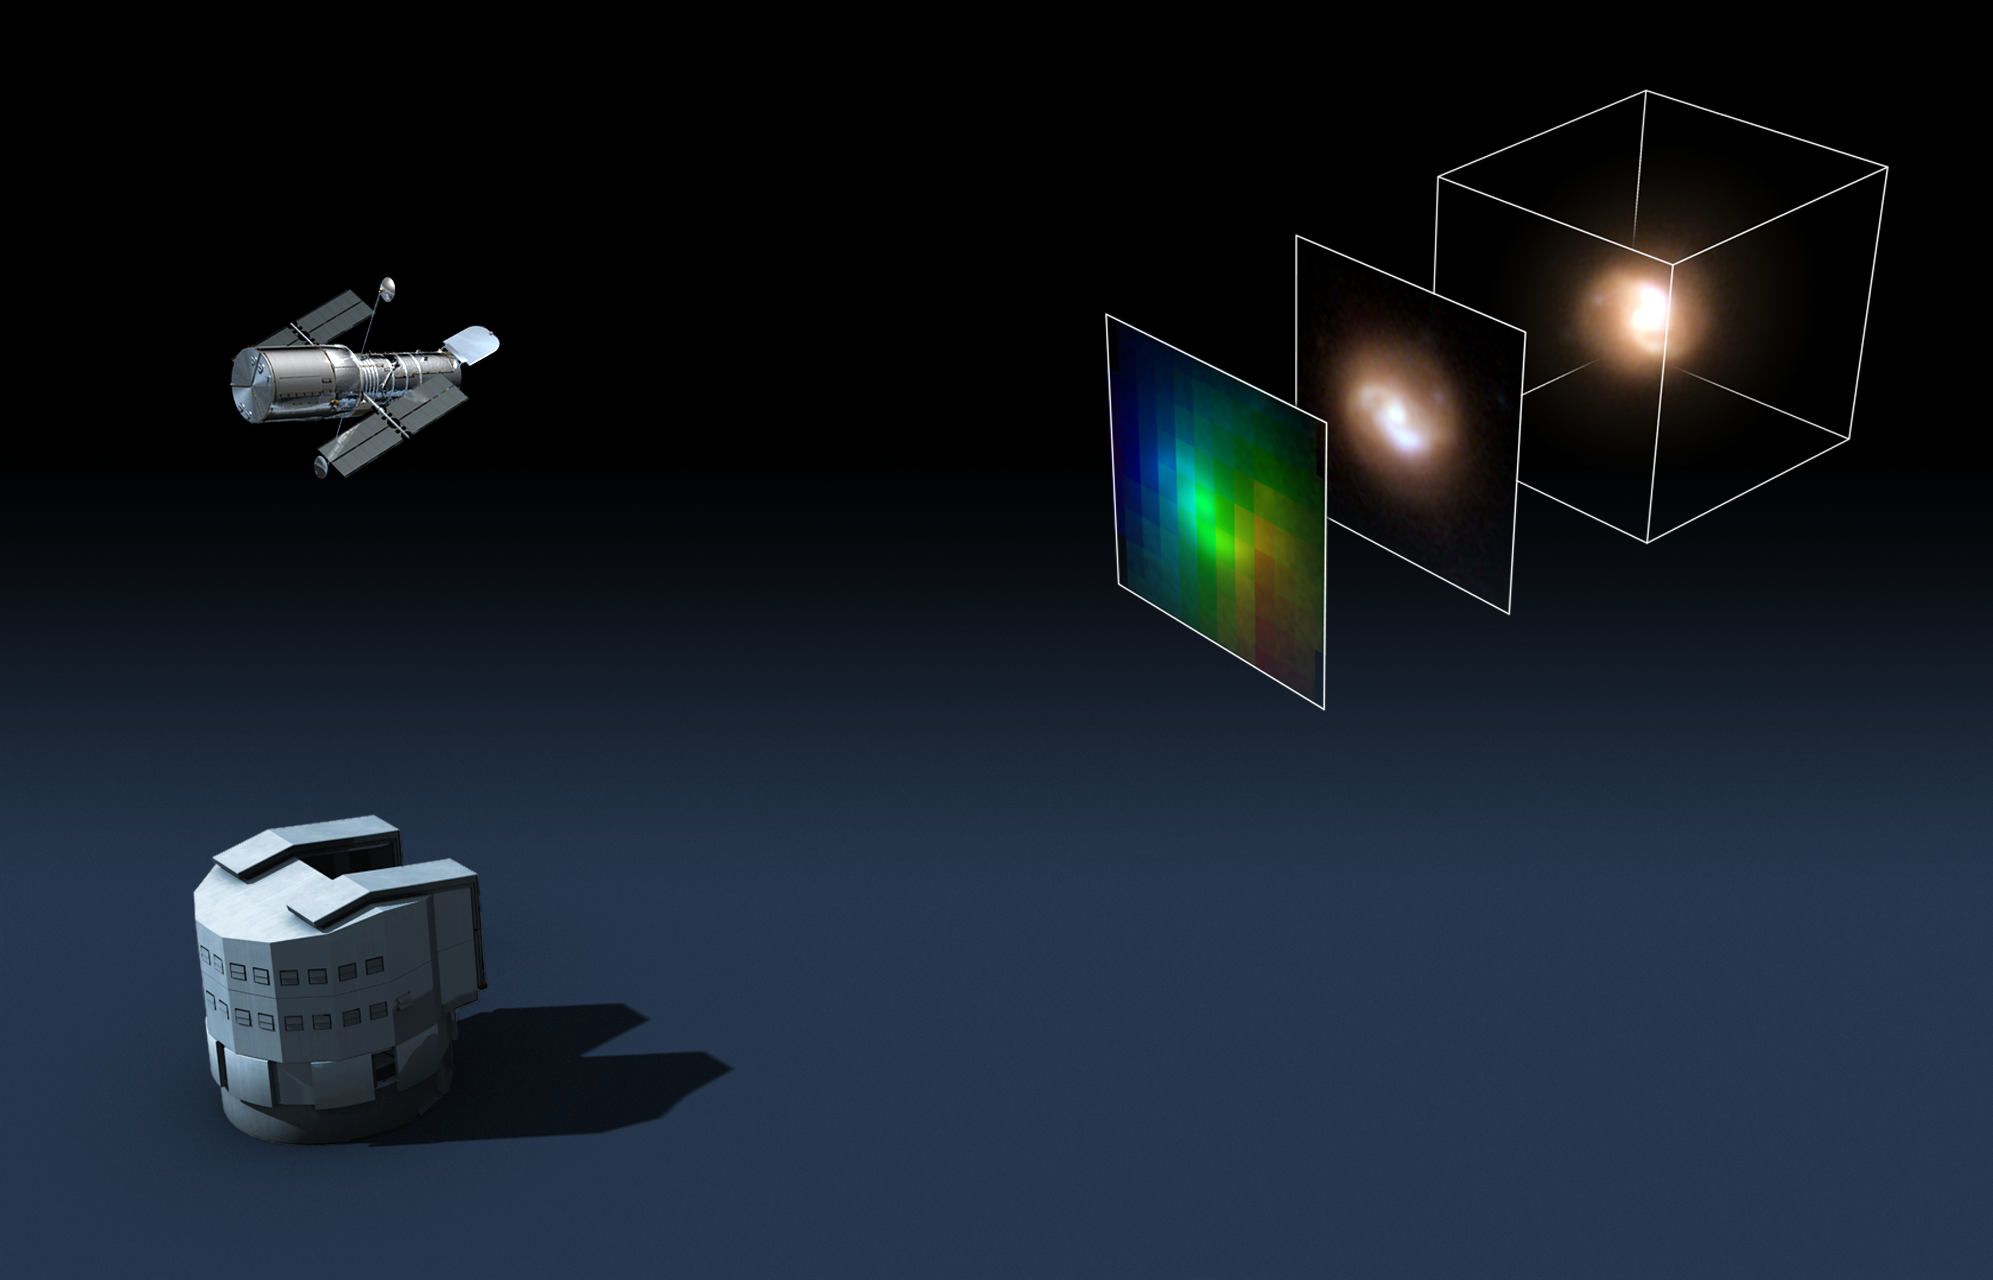

Hubble and ESO's VLT provide unique 3D views of remote galaxies

NASA/ESA's Hubble Space Telescope partnered with ESO's VLT to obtain exceptional 3D views of distant galaxies by probing the motions of gas in tiny objects, seen when the Universe was half its current age. By looking at this unique "history book" of our Universe, at an epoch when the Sun and the Earth did not yet exist, scientists hope to solve the puzzle of how galaxies formed in the remote past.

For decades, distant galaxies that emitted their light six billion years ago were no more than small specks of light on the sky. With the launch of the Hubble Space Telescope in the early 1990s, astronomers were able to scrutinise the structure of distant galaxies in some detail for the first time. Under the superb skies of Paranal, the VLT's FLAMES/GIRAFFE spectrograph (ESO 13/02) — which obtains simultaneous spectra from small areas of extended objects — can now also resolve the motions of the gas in these distant galaxies (ESO 10/06).

"This unique combination of Hubble and the VLT allows us to model distant galaxies almost as nicely as we can close ones," says François Hammer, who led the team. “In effect, FLAMES/GIRAFFE now allows us to measure the velocity of the gas at various locations in these objects. This means that we can see how the gas is moving, which provides us with a three-dimensional view of galaxies halfway across the Universe.”

The team has undertaken the Herculean task of reconstituting the history of about one hundred remote galaxies that have been observed with both Hubble and GIRAFFE on the VLT. The first results are coming in and have already provided useful insights for three galaxies.

"The unique combination of Hubble and FLAMES/GIRAFFE at the VLT makes it possible to model distant galaxies in great detail, and reach a consensus on the crucial role of galaxy collisions for the formation of stars in a remote past," says Puech. "It is because we can now see how the gas is moving that we can trace back the mass and the orbits of the ancestral galaxies relatively accurately. Hubble and the VLT are real 'time machines' for probing the Universe's history", adds Sébastien Peirani, lead author of another paper reporting on this study.

The astronomers are now extending their analysis to the whole sample of galaxies observed. "The next step will then be to compare this with closer galaxies, and so, piece together a picture of the evolution of galaxies over the past six to eight billion years, that is, over half the age of the Universe," concludes Hammer.

Image credit: ESO, NASA/ESA

Credit: NASA & ESA